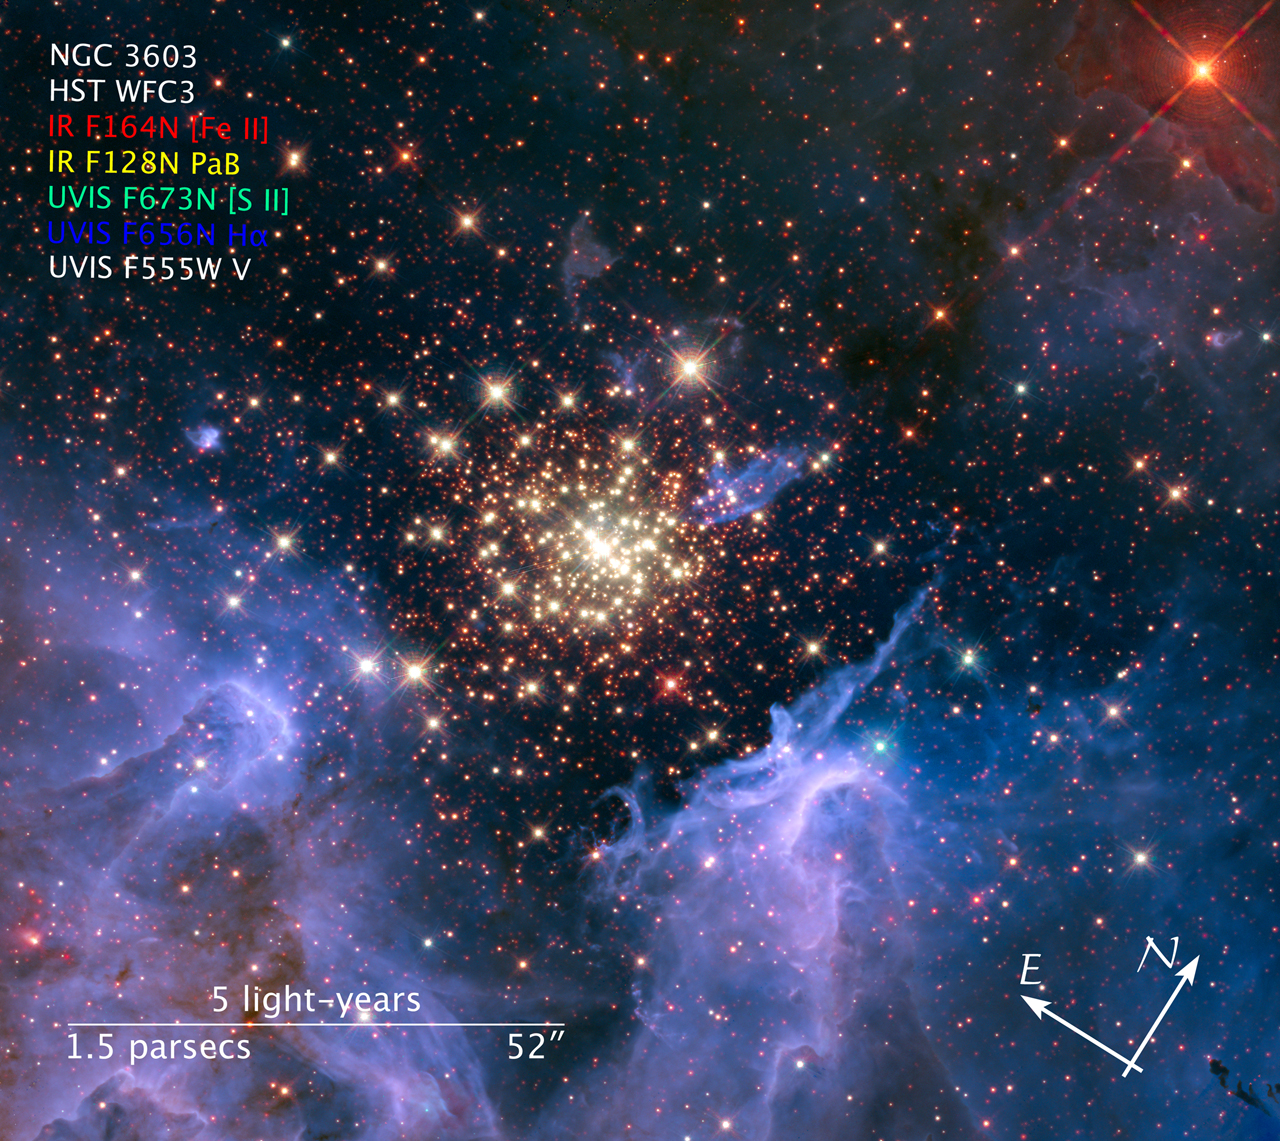

Compass and scale image for NGC 3603

Compass and scale image for NGC 3603.

Credit: NASA, ESA, and Z. Levay (STScI). Science Credit: NASA, ESA, R. O'Connell (University of Virginia), F. Paresce (National Institute for Astrophysics, Bologna, Italy), E. Young (Universities Space Research Association/Ames Research Center), the WFC3 Science Oversight Committee, and the Hubble Heritage Team (STScI/AURA)